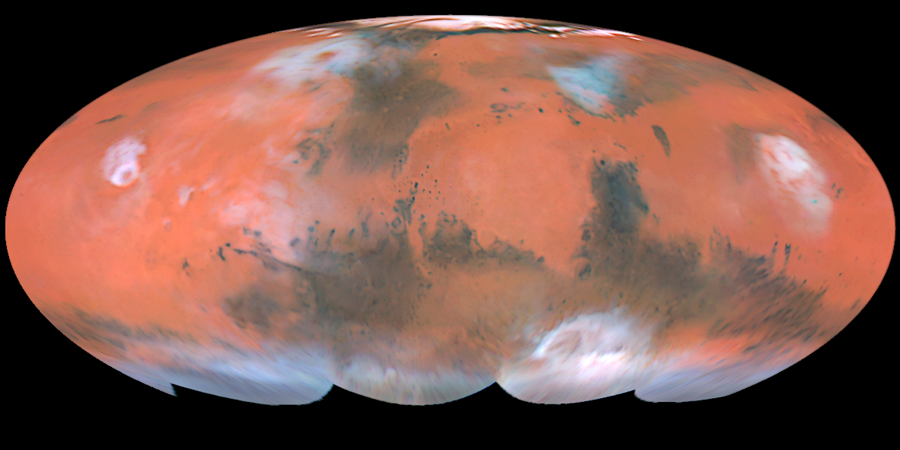

A Global Mars Map

The four hemispheric views shown above have been combined into a full-color global map (called a Mollweide projection), showing the regions of Mars imaged by the Hubble telescope during the planet's closest approach to Earth. Latitudes below about 60 degrees south were not viewed by the telescope because the planet's north pole was tilted towards Earth during this time. This image is a composite of pictures taken with three filters: blues (410 nanometers), green (502 nanometers), and red (673 nanometers). The Hubble telescope's resolution is 12 miles per pixel (20 kilometers per pixel) near the Martian equator.

Credit: Steve Lee (University of Colorado), Jim Bell (Cornell University), Mike Wolff (Space Science Institute), and NASA/ESA